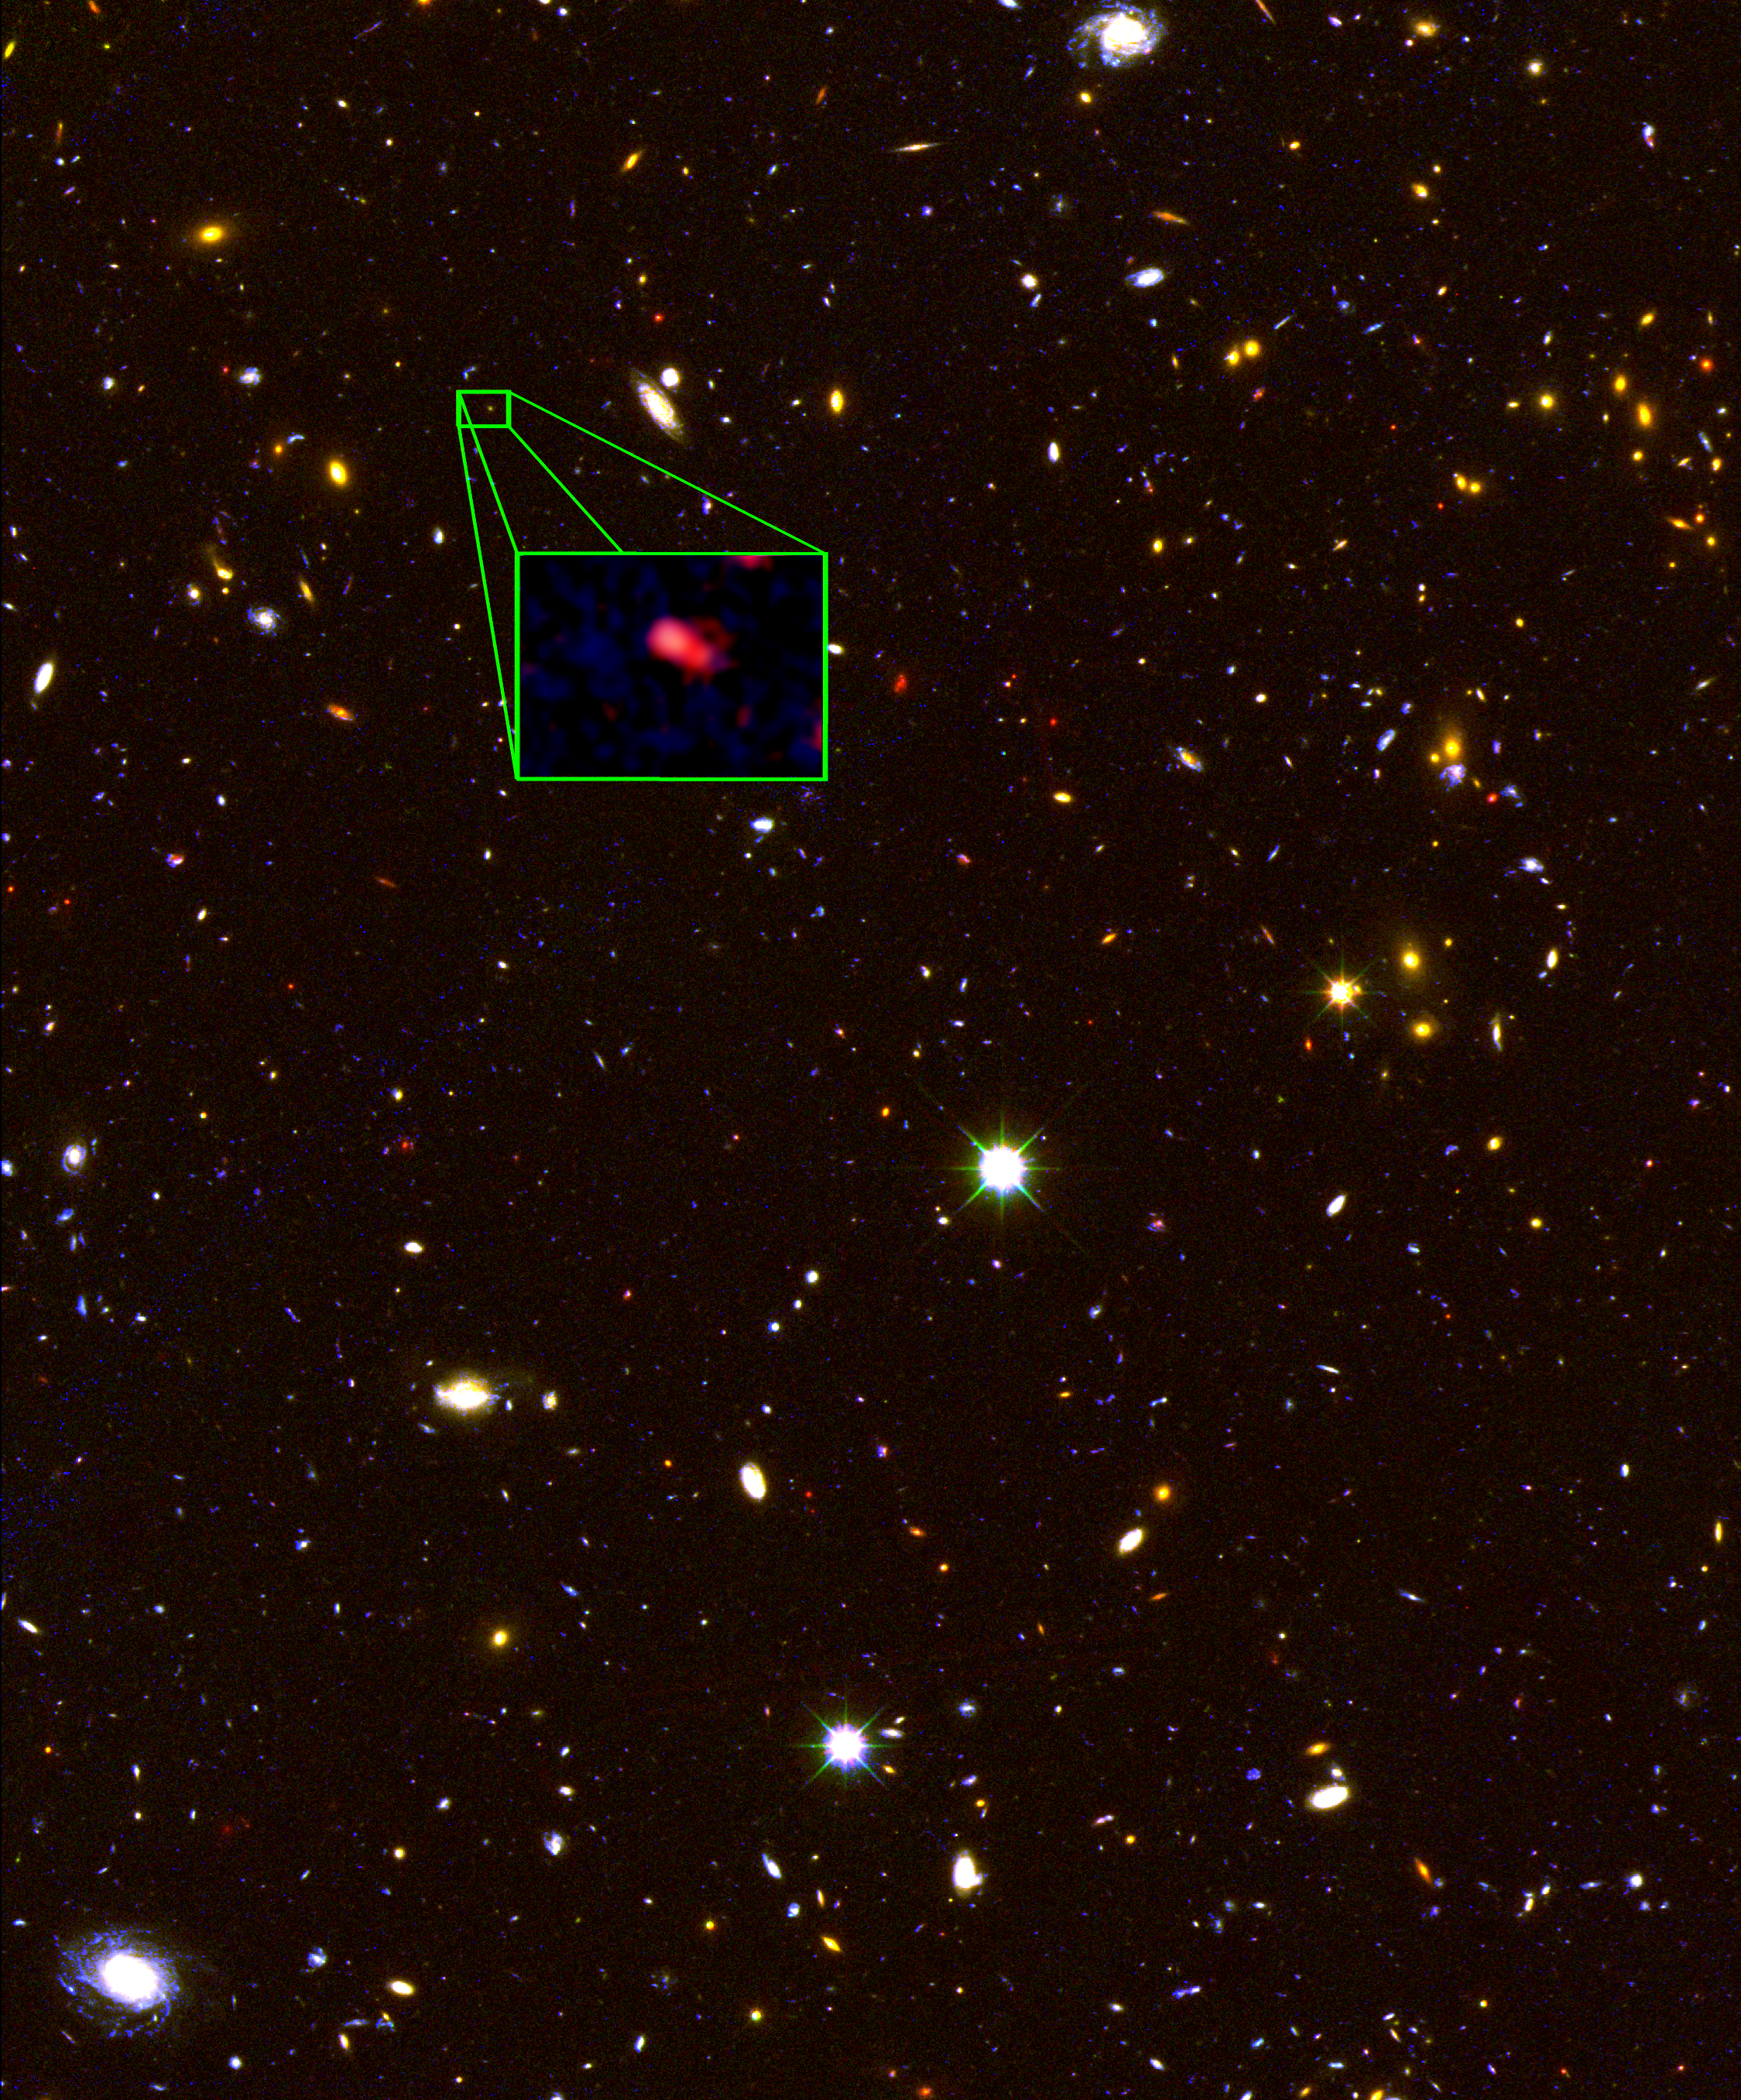

New Hubble CANDELS image of most distant known galaxy z8_GND_5296

This image from the NASA/ESA Hubble Space Telescope CANDELS survey highlights the most distant galaxy in the Universe with a definitively measured distance, dubbed z8_GND_5296. The galaxy's red colour alerted astronomers that it was likely extremely far away, and thus seen at an early time after the Big Bang. A team of astronomers measured the exact distance using the Keck I telescope with the new MOSFIRE spectrograph. They found that this galaxy is seen at about 700 million years after the Big Bang, when the Universe was just 5 percent of its current age of 13.8 billion years.

Credit: NASA, ESA, V. Tilvi (Texas A&M University), S. Finkelstein (University of Texas, Austin), and C. Papovich (Texas A&M University)